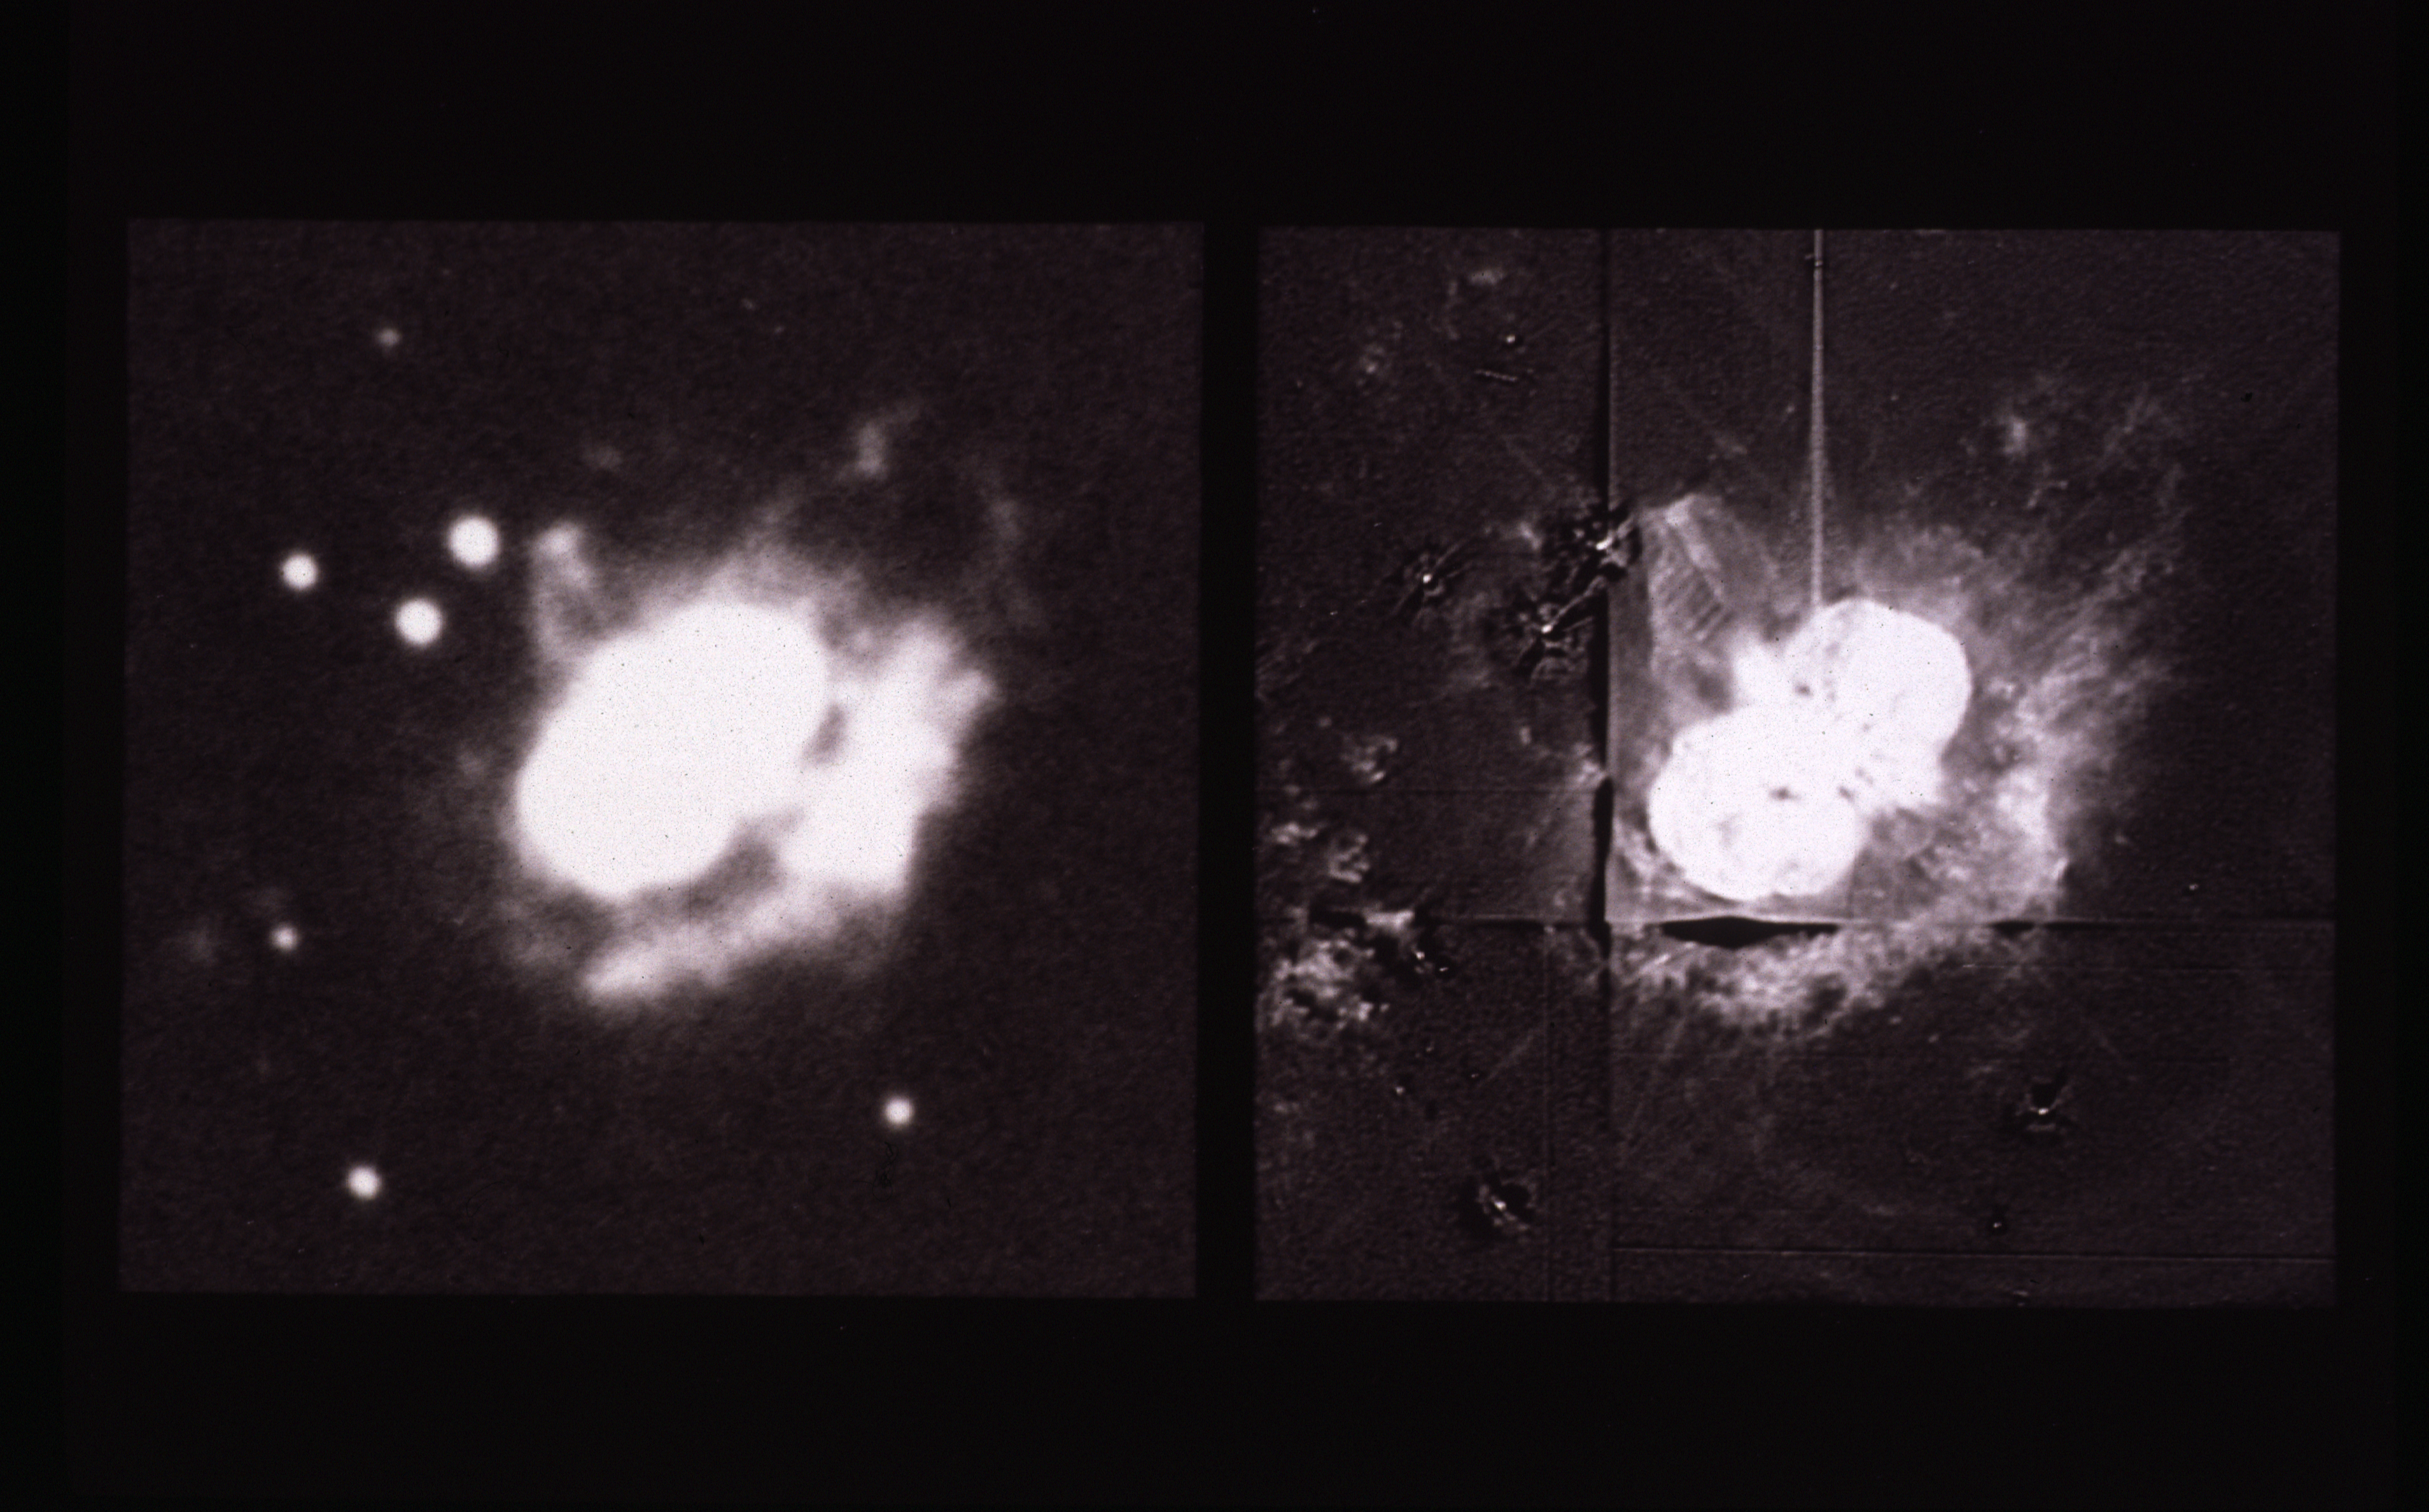

Eta Carinae

Observations of a massive, unstable star called Eta Carinae, made with the Wide Field and Planetary Camera (WF/PC) aboard NASA/ESA Hubble Space Telescope HST, reveal surprising and complex new structure in a dusty nebula surrounding the star. New details include a jet of material flowing away from the star and a regularly spaced set of wave-like features. The results are being reported on May 17, 1991 at the Hubble Space Telescope Science Writer's Workshop in Baltimore MD.

Credit: NASA and ESA